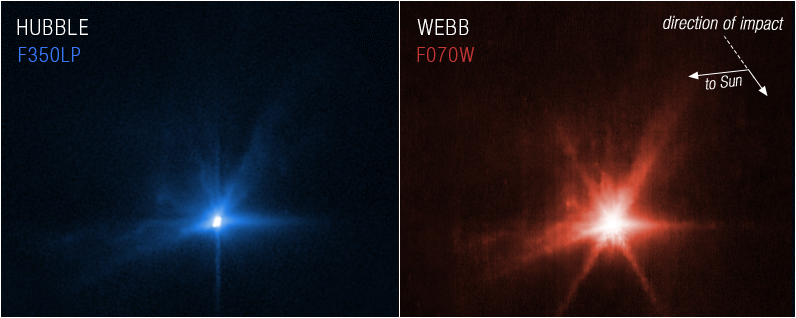

Webb and Hubble Capture Detailed Views of DART Debris (27 September 2022)

For the first time, the NASA/ESA/CSA James Webb Space Telescope and the NASA/ESA Hubble Space Telescope have taken simultaneous observations of the same target.

These images, Hubble on left and Webb on the right, show observations of Dimorphos several hours after NASA’s Double Asteroid Redirection Test (DART) intentionally impacted the moonlet asteroid. It was the world’s first test of the kinetic impact technique using a spacecraft to deflect an asteroid by modifying its orbit.

Both Webb and Hubble observed the asteroid before and after the collision took place.

Scientists will use the combined observations from Hubble and Webb to gain knowledge about the nature of the surface of Dimorphos, how much material was ejected by the collision, how fast it was ejected, and the distribution of particle sizes in the expanding dust cloud.

In the coming months, scientists will also use Webb’s Mid-Infrared Instrument (MIRI) and Near-Infrared Spectrograph (NIRSpec) to observe Dimorphos further. Spectroscopic data will provide researchers with insight into the asteroid’s composition. Hubble will monitor Dimorphos ten more times over the next three weeks to monitor how the ejecta cloud expands and fades over time.

Hubble observations were conducted in one filter, WFC3/UVIS F350LP (assigned the colour blue), while Webb observed at F070W (0.7 microns, assigned the colour red).

Credit: NASA, ESA, CSA, and STScI